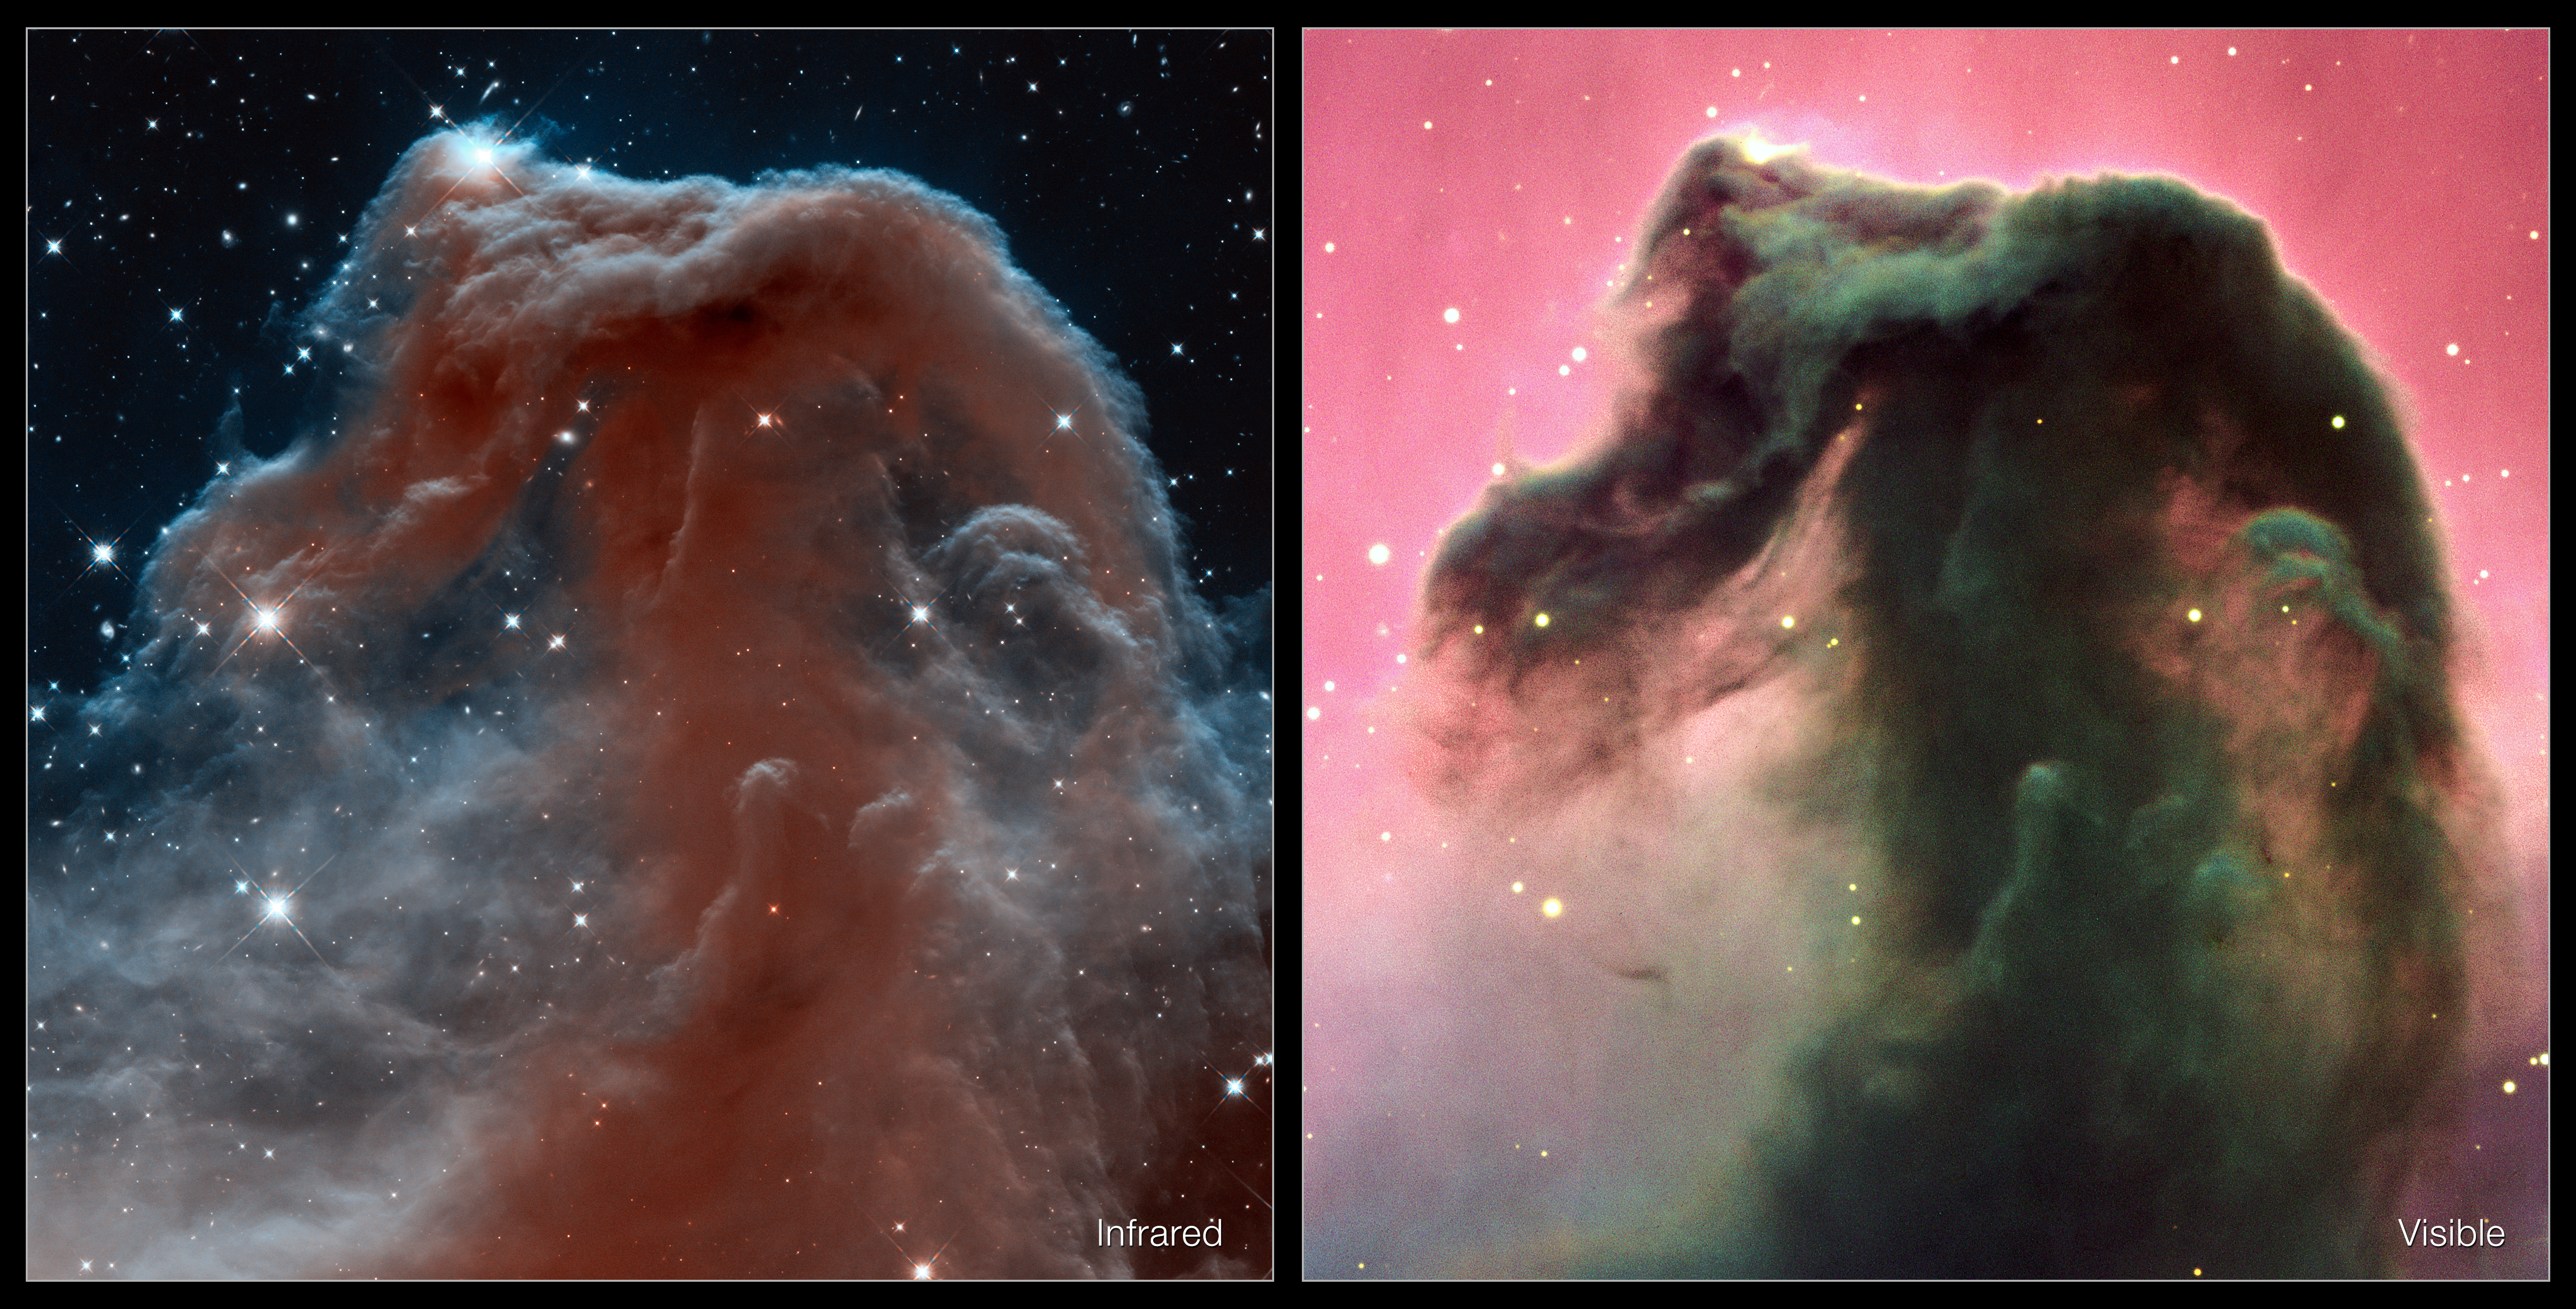

Visible and infrared views of the Horsehead Nebula

This image shows two different views of the Horsehead Nebula. On the right is a view of the nebula in visible light, taken using the European Southern Observatory’s Very Large Telescope in Chile (eso0202a). The new image on the left shows the nebula in the infrared, using observations from Hubble’s high-resolution Wide Field Camera 3.

Credit: NASA, ESA, and the Hubble Heritage Team (AURA/STScI); ESO